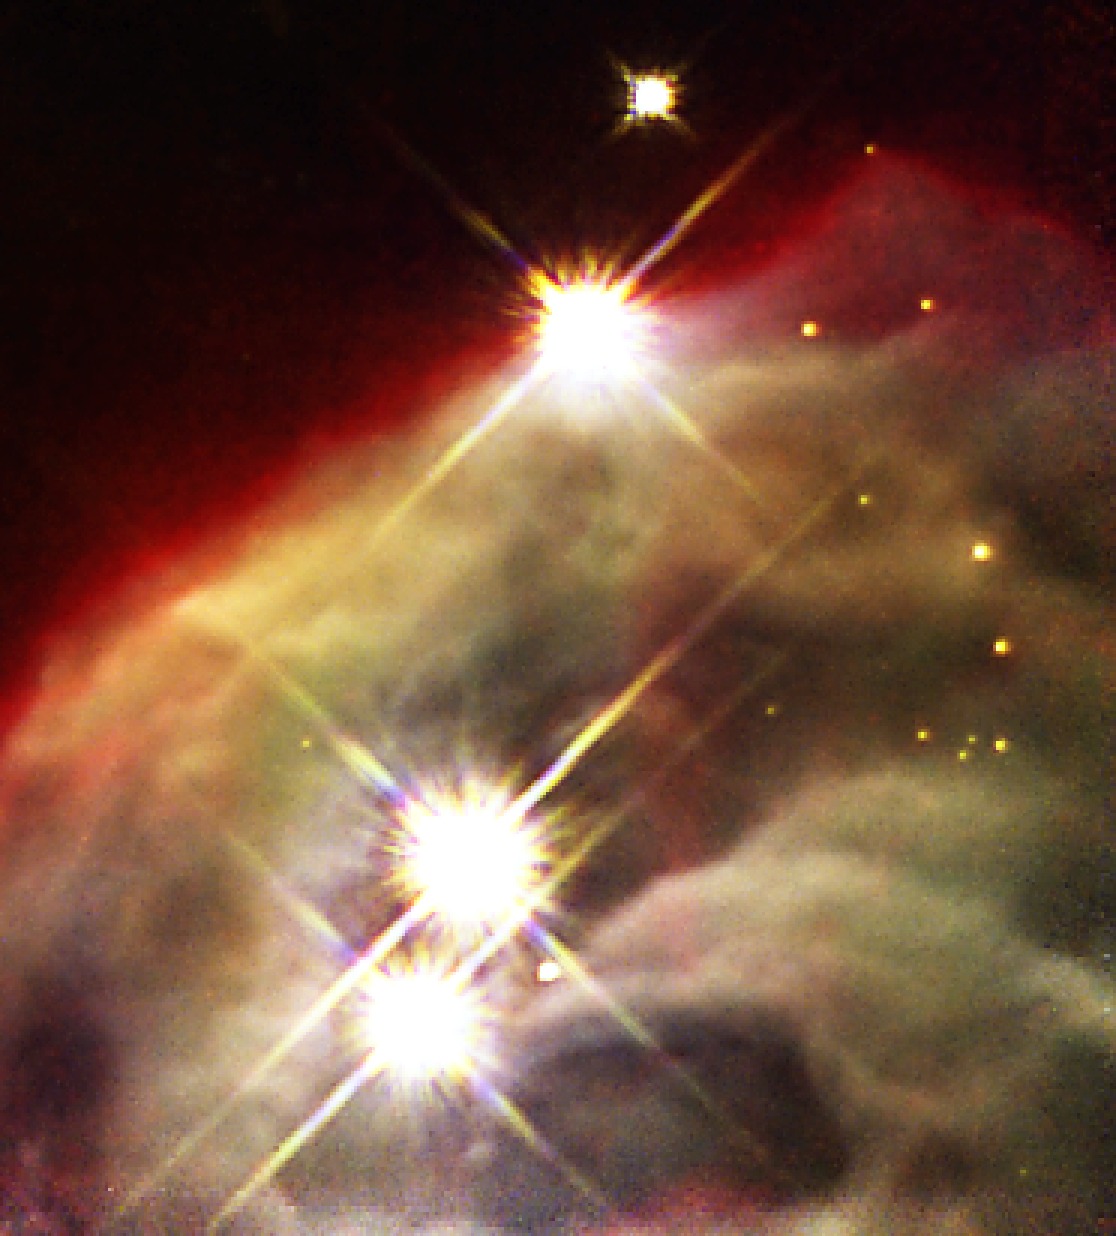

NICMOS uncovers dust layers to show inner region of dusty nebula (NICMOS image)

The revived Near Infrared Camera and Multi-Object Spectrometer (NICMOS) aboard the NASA/ESA Hubble Space Telescope has penetrated dust layers in a star-forming cloud to uncover a dense, craggy edifice of dust and gas.

This NICMOS image shows the Cone Nebula (NGC 2264), so named because, in ground-based images, it has a conical shape. NICMOS enables the Hubble telescope to see near-infrared wavelengths of light, so that it can penetrate the dust that obscures the nebula's inner regions. However, the Cone is so dense even the near-infrared 'eyes' of NICMOS cannot penetrate all the way through it.

The human eye cannot see infrared light so colours have been assigned to correspond to near-infrared wavelengths. The blue light represents shorter near-infrared wavelengths and the red light corresponds to longer wavelengths.

The NICMOS colour composite image was made by combining photographs taken through J-band, H-band, and Paschen-alpha filters. The NICMOS images were taken on 11 May 2002.

Credit: NASA, ESA, the NICMOS Group (STScI, ESA) and the NICMOS Science Team (Univ. of Arizona)